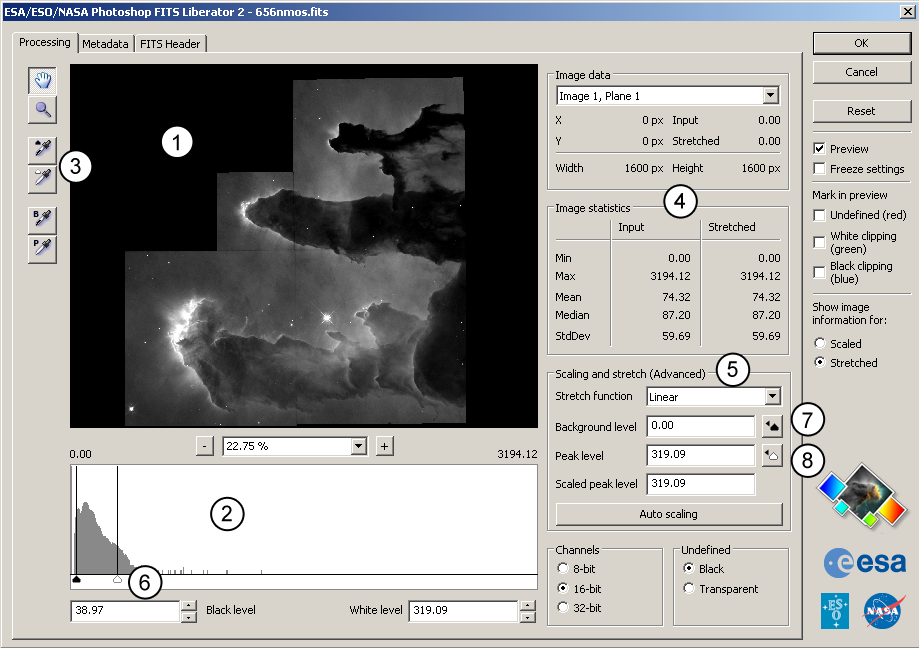

Photoshop FITS Liberator version 2 - create spectacular pictures in minutes

This image shows the User Interface for the ESA/ESO/NASA Photoshop FITS Liberator version 2. With this software, released today, it is now easier and faster than ever before to create colour images from raw observations from for instance the NASA/ESA Hubble Space Telescope, ESA's XMM-Newton and the NASA Spitzer Space Telescope.

The numbers indicate:

The preview window
Histogram
Tools
Statistics
Advanced tools for scaling and stretch

The simple workflow is to open a FITS image, study it in the Preview window, adjust the black- and white levels (6) to give a reasonable contrast, and then set the input range for the scaling of the image by clicking Auto Scaling Button (7). Now different values of the Scaled Peak level can be tested to scale the image more or less to better fit with one of the possible Stretch functions (8).

Many astronomical images have very high dynamic range, or many greyscales. This means that the brightest areas of interest may be many thousands (even millions) of times brighter than the faintest structures in the image. On a computer screen, however, one only can see 256 levels of brightness one is forced to either lose the faint structures to black, or to oversaturate (or burn in) the brightest objects.

For this reason, the FITS Liberator has an advanced "Scaling and Stretch" section that provides many options for compressing this dynamic range using mathematical functions such as a logarithm as the data are imported.

Credit: ESA, ESO & NASA